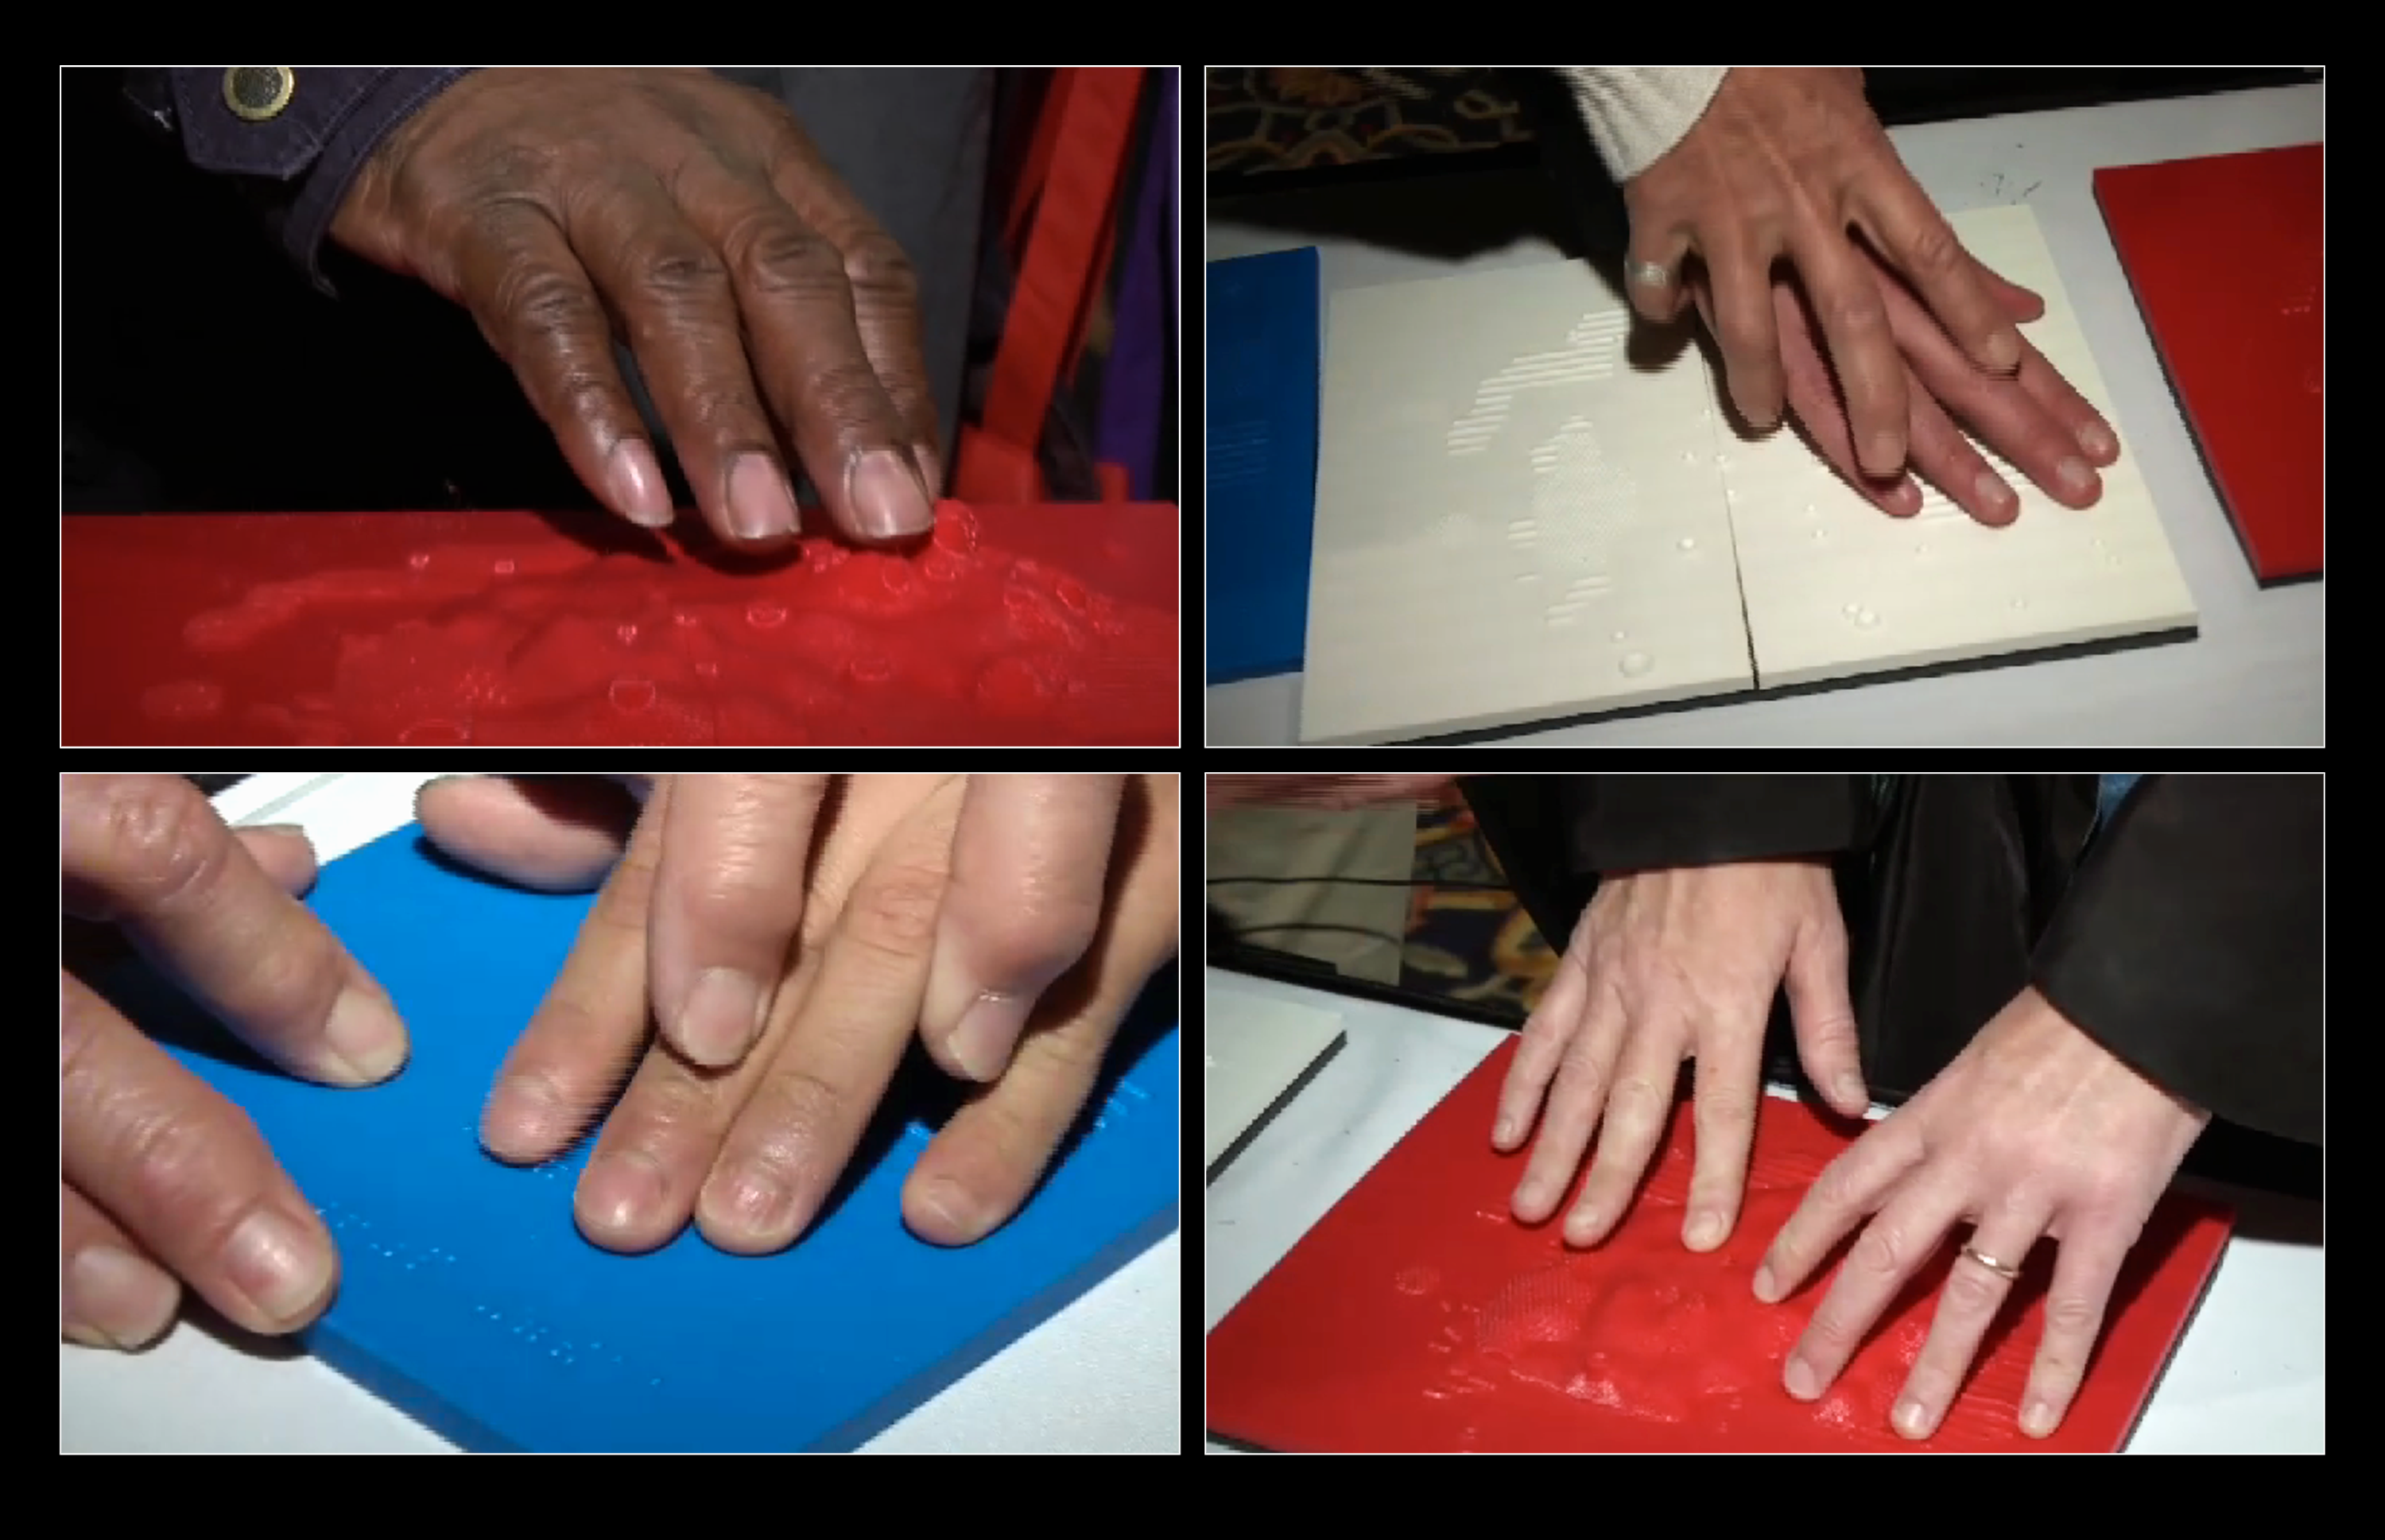

Hubble images become tactile 3D experience for the blind

These screenshots are taken from footage of the National Federation of the Blind's (NFB) national convention in July 2013, when early low-resolution prototypes of 3D printouts were tested by people with visual impairments. These 3D printouts are based on Hubble data, and use different textures and heights to represent different components of bright star cluster NGC 602, located in our neighbouring galaxy the Small Magellanic Cloud. These prototypes gave a glimpse of the potential that 3D printing could have for astronomy.

Credit: NASA, ESA, and M. Estacion (STScI) Science Credit: NASA, ESA, and C. Christian and A. Nota (STScI)